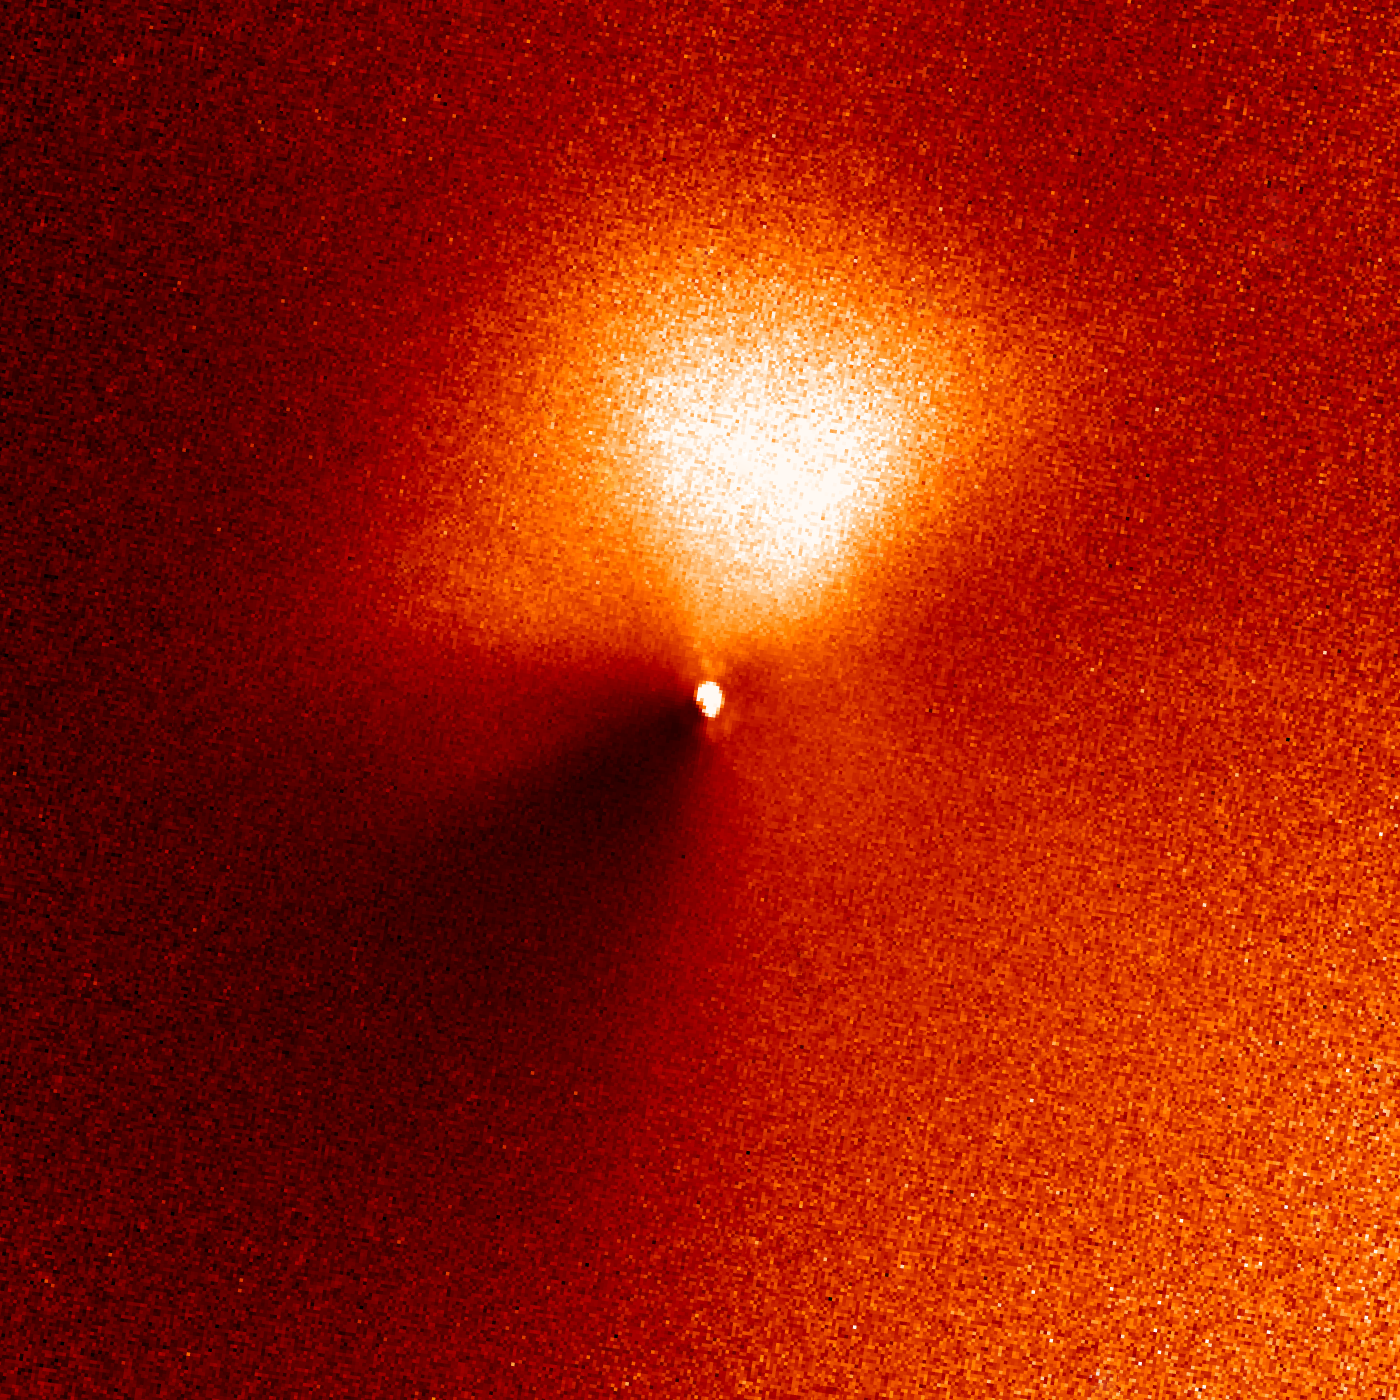

Hubble captures outburst from comet targeted by Deep Impact (14:15 UT image)

In a dress rehearsal for the rendezvous between NASA's Deep Impact spacecraft and comet 9P/Tempel 1, the Hubble Space Telescope captured dramatic images of a new jet of dust streaming from the icy comet.

The images are a reminder that Tempel 1's icy nucleus, roughly the size of central Paris, is dynamic and volatile. Astronomers hope the eruption of dust seen in these observations is a preview of the fireworks that may come 4 July, when a probe from the Deep Impact spacecraft will slam into the comet, possibly blasting off material and giving rise to a similar dust plume.

Credit: NASA, ESA, P. Feldman (Johns Hopkins University), and H. Weaver (Applied Physics Lab)